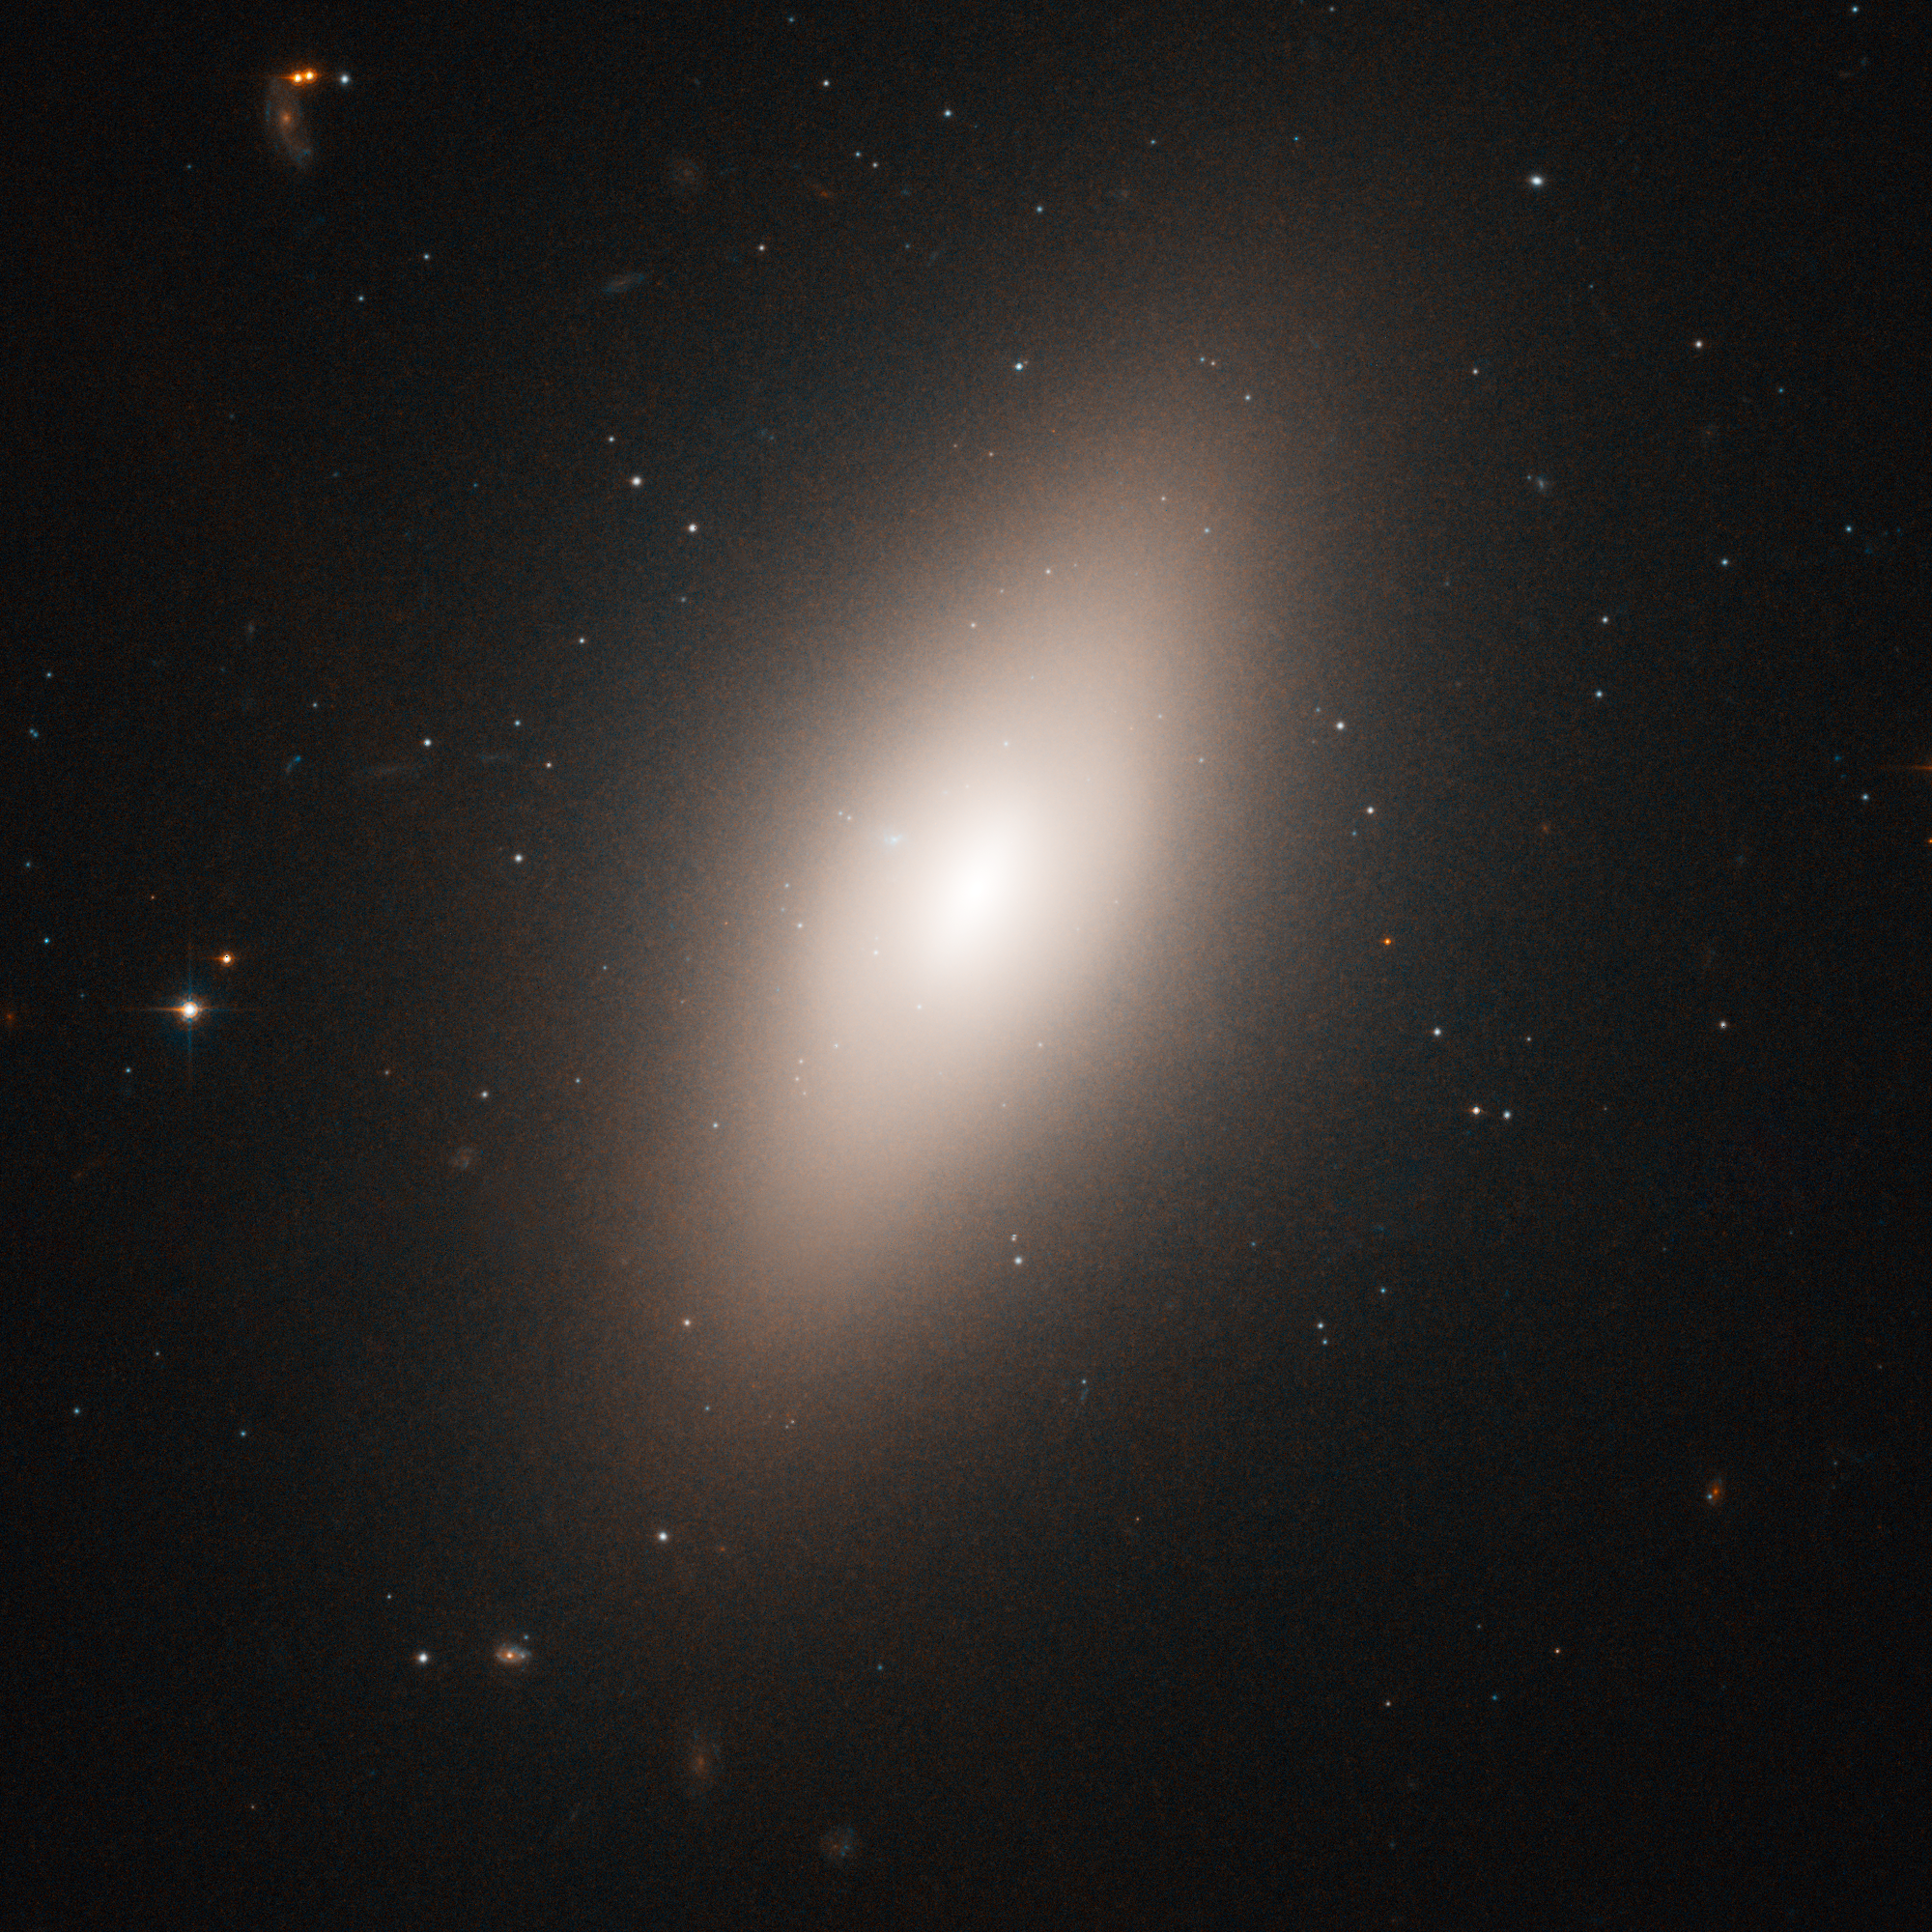

NGC 4660 in the Virgo cluster of galaxies

Virgo cluster galaxy NGC 4660, na elliptical located about 50 million light-years from Earth. Hubble's "eye" is so sharp that it was able to pick out the fuzzy globular clusters, which, at that distance, look like individual stars bunched up around the galaxies, instead of groupings of stars.

Credit: ESA, NASA and E. Peng (Peking University, Beijing)